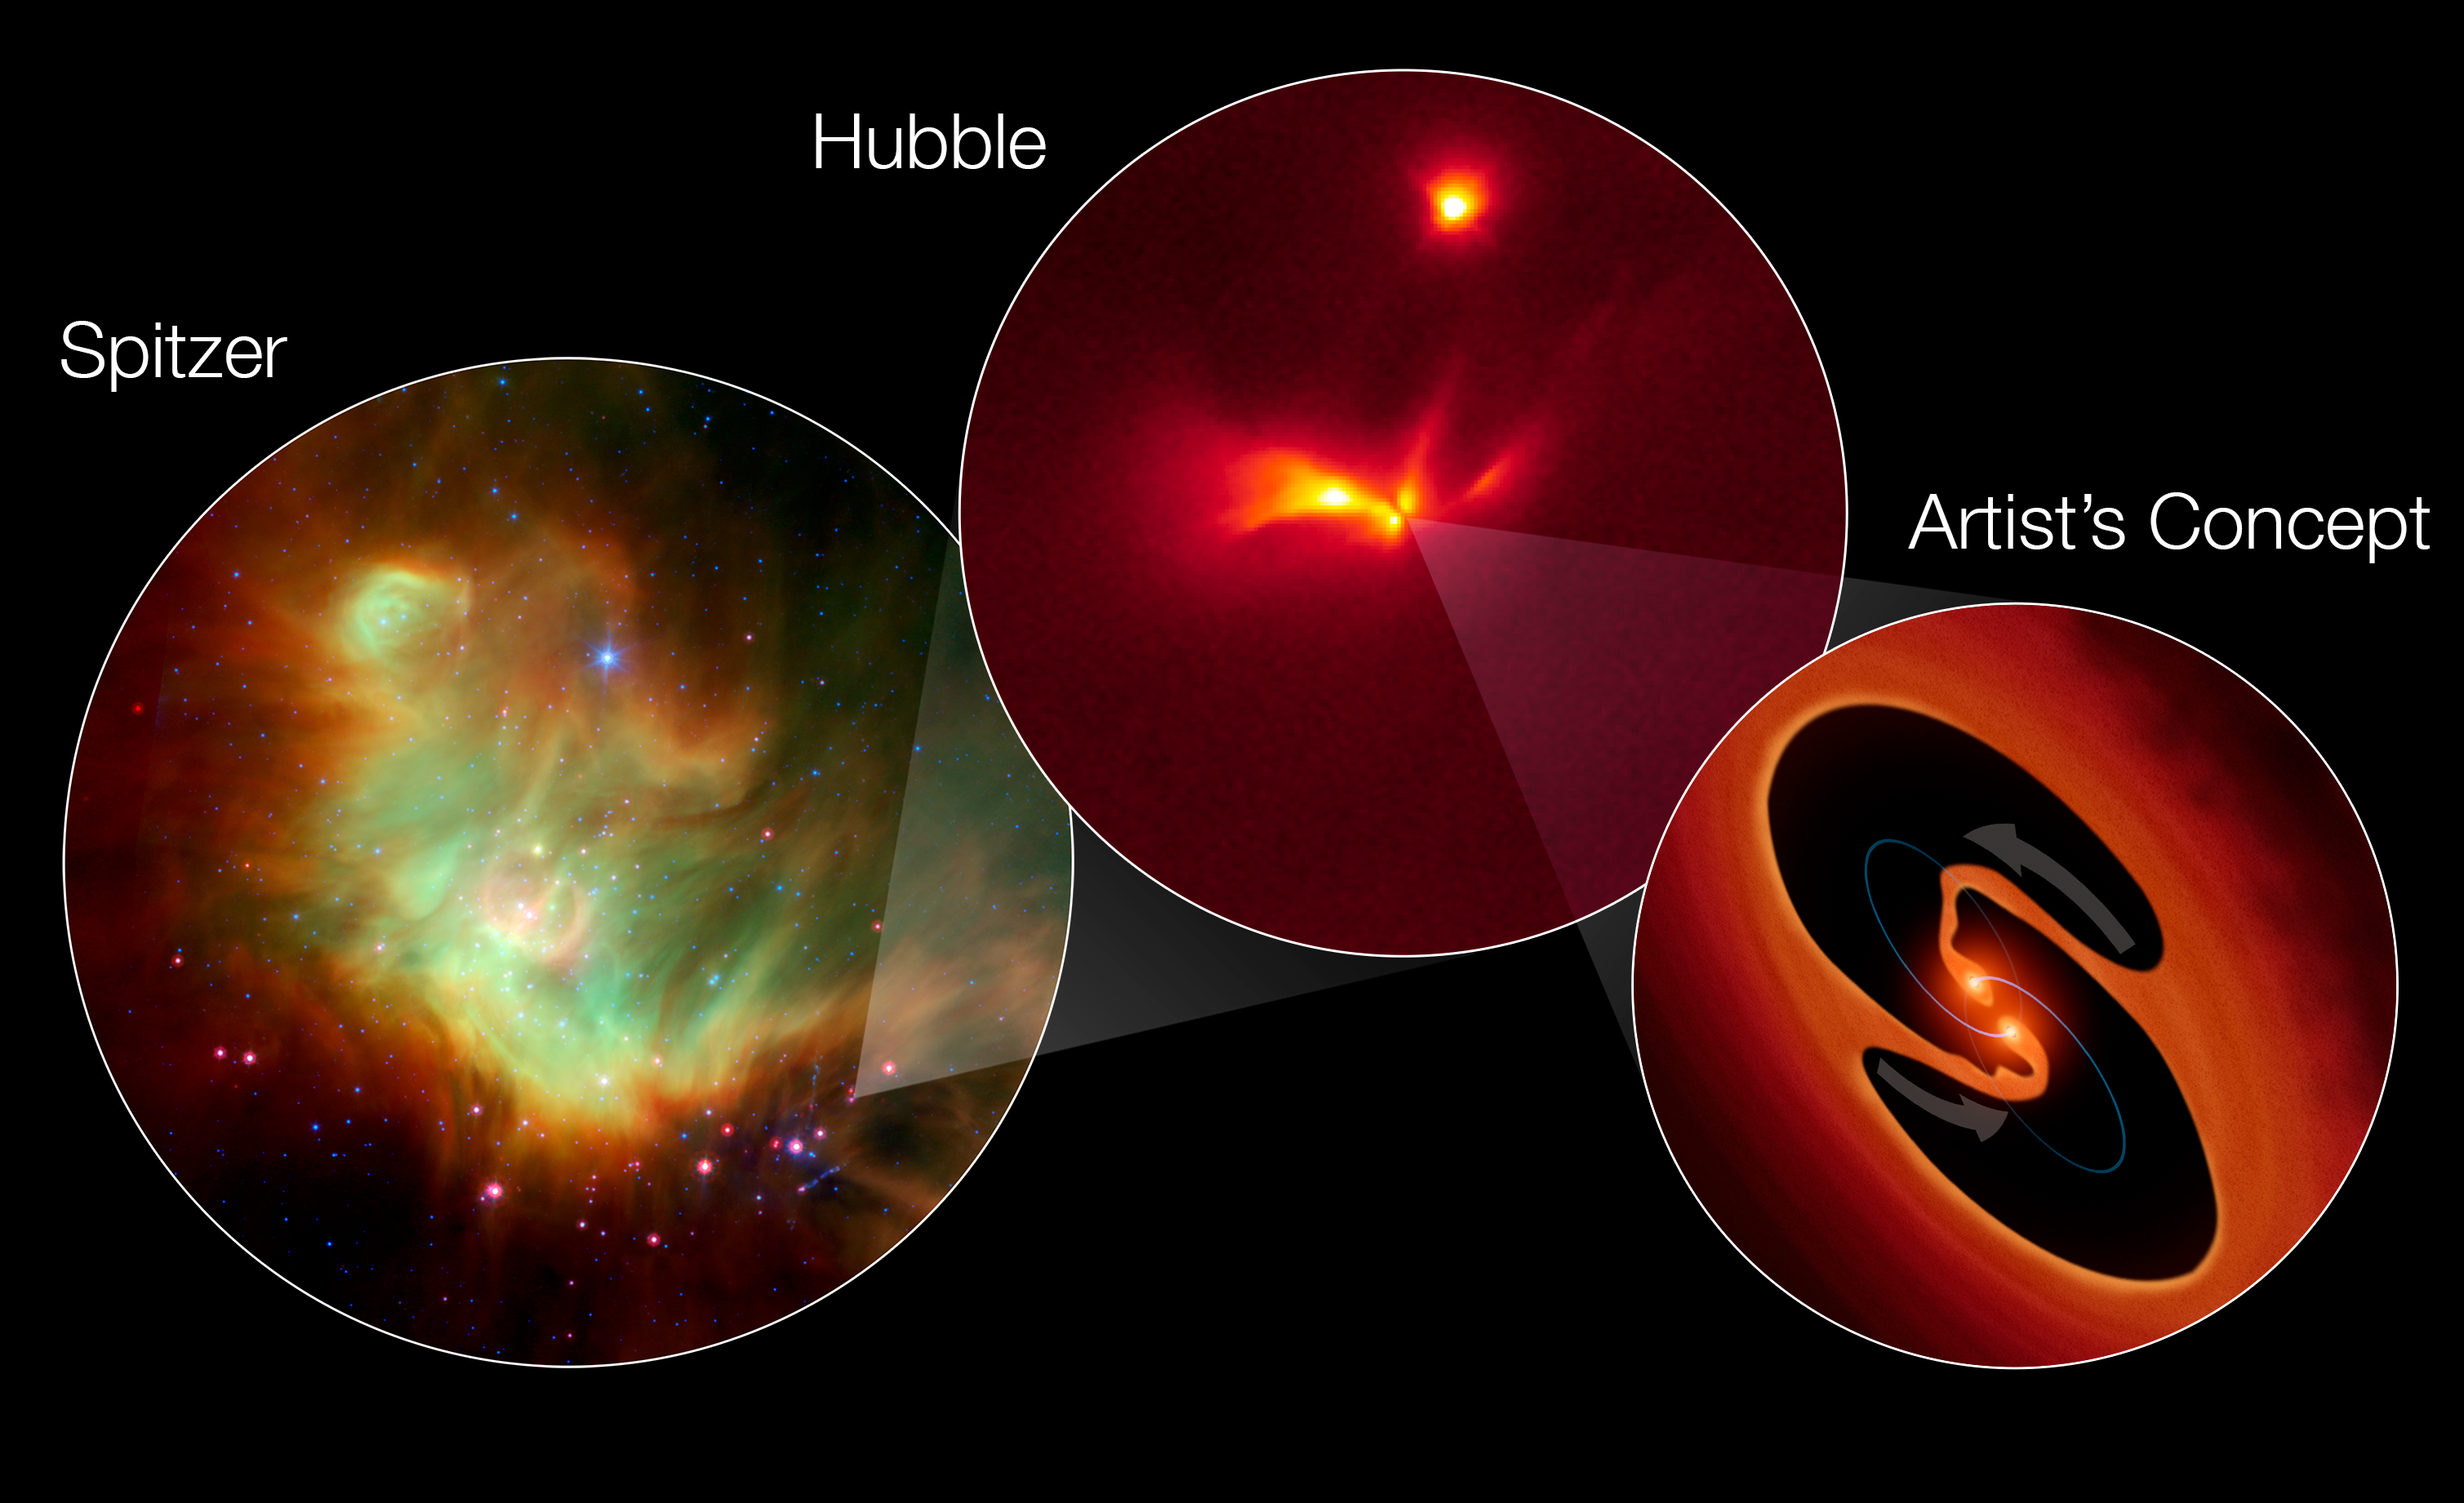

How LRLL 54361 flashes like a strobe light

The NASA/ESA Hubble Space Telescope has made a time-lapse movie of protostar LRLL 54361 as it sends flashes of light through the surrounding nebula.

This image shows:

On the left, an infrared image from the NASA Spitzer Space Telescope shows LRLL 54361 inside the star-forming region IC 348 located 950 light-years away. The Spitzer Space Telescope discovered the unusual flashing protostar here.

In the centre: This Hubble image resolves the detailed structure around the protostar, consisting of two cavities that are traced by light scattered off their edges above and below a dusty disk. The cavities were likely blown out of the surrounding natal envelope of dust and gas by an outflow launched near the central object.

On the right: This artist’s impression represents scientists’ theory for how and why the protostar gives off these regular flashes of light. Astronomers propose that the flashes are due to material in a circumstellar disk suddenly being dumped onto the growing stars and unleashing a blast of radiation each time the stars get close to each other in their orbit.

Credit: NASA, ESA, J. Muzerolle (STScI), E. Furlan (NOAO, Caltech), and R. Hurt (Caltech)